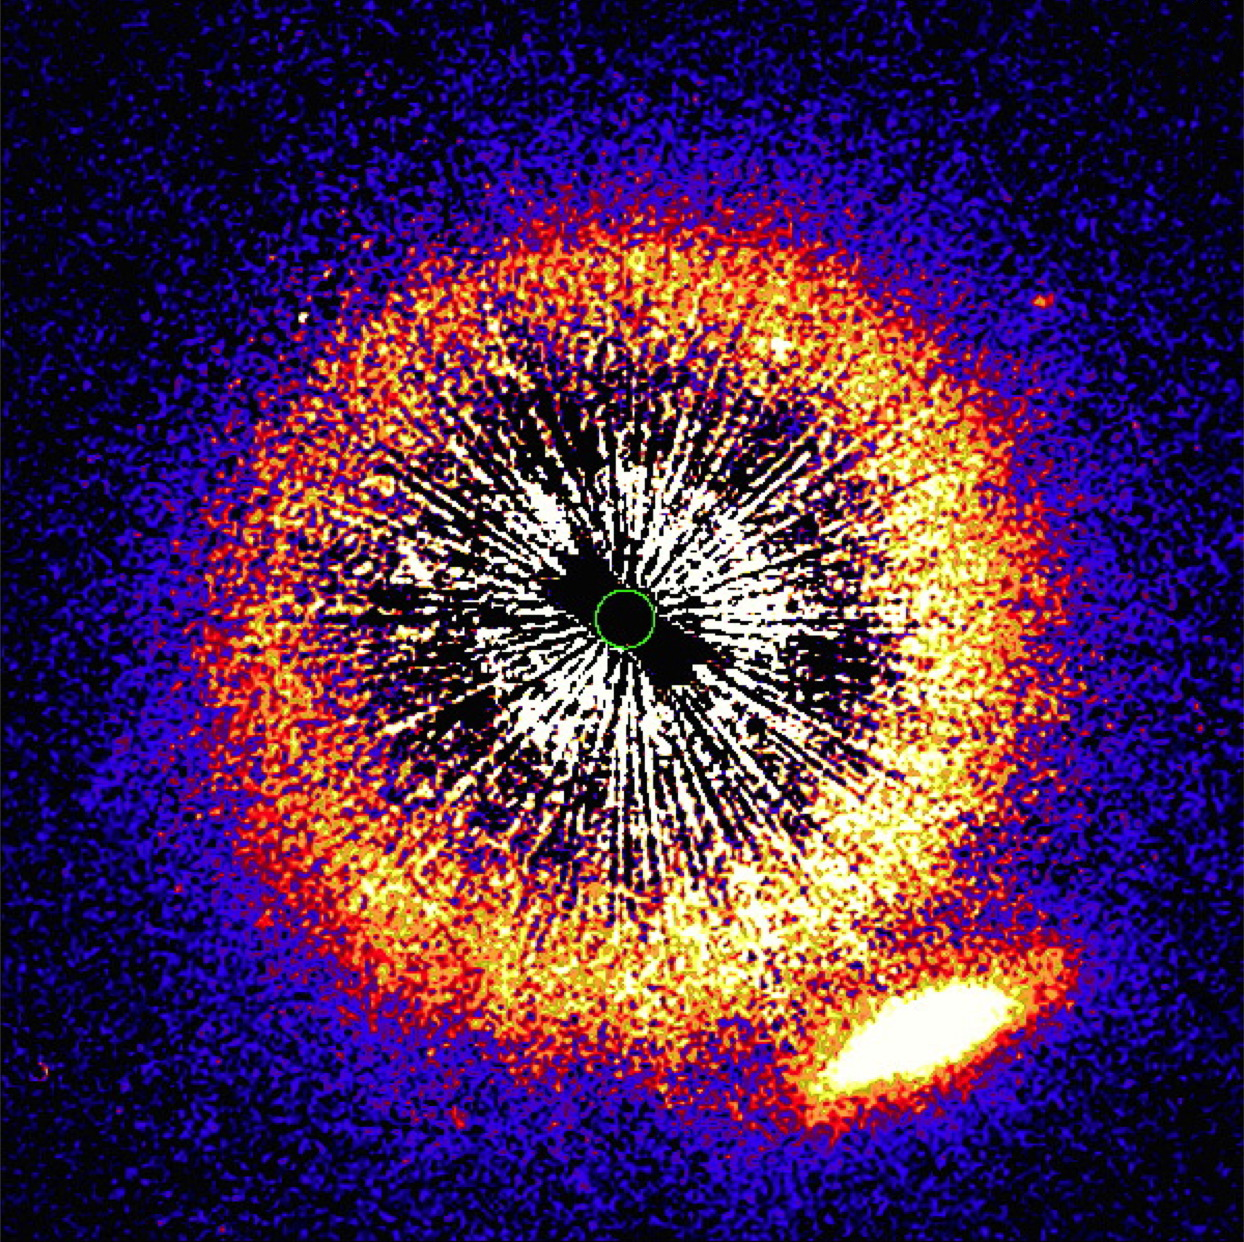

Viewing the Vermin Galaxy

The NASA/ESA Hubble Space Telescope is famous for its jaw-dropping snapshots of the cosmos. At first glance this Picture of the Week appears to be quite the opposite, showing just a blur of jagged spikes, speckled noise, and weird, clashing colours — but once you know what you are looking at, images like this one are no less breathtaking.

This shows a distant galaxy — visible as the smudge to the lower right — as it begins to align with and pass behind a star sitting nearer to us within the Milky Way. This is an event known as a transit. The star is called HD 107146, and it sits at the centre of the frame. Its light has been blocked in this image to make its immediate surroundings and the faint galaxy visible — the position of the star is marked with a green circle.

The concentric orange circle surrounding HD 107146 is a circumstellar disc — a disc of debris orbiting the star. In the case of HD 107146 we see the disc face-on. As this star very much resembles our Sun, it is an interesting scientific target to study: its circumstellar disc could be analogous to the asteroids in our Solar System and the Kuiper belt.

A detailed study of this system is possible because of the much more distant galaxy — nicknamed the “Vermin Galaxy” by some to reflect their annoyance at its presence — as the star passes in front of it. The unusual pairing was first observed in 2004 by Hubble’s Advanced Camera for Surveys, and again in 2011 by Hubble’s Space Telescope Imaging Spectrograph. The latter image is shown here, as the Vermin Galaxy began its transit behind HD 107146. The galaxy will not be fully obscured until around 2020, but interesting science can be done even while the galaxy is only partly obscured. Light from the galaxy will pass through the star’s debris discs before reaching our telescopes, allowing us to study the properties of the light and how it changes, and thus infer the characteristics of the disc itself.

Credit: ESA/Hubble & NASA